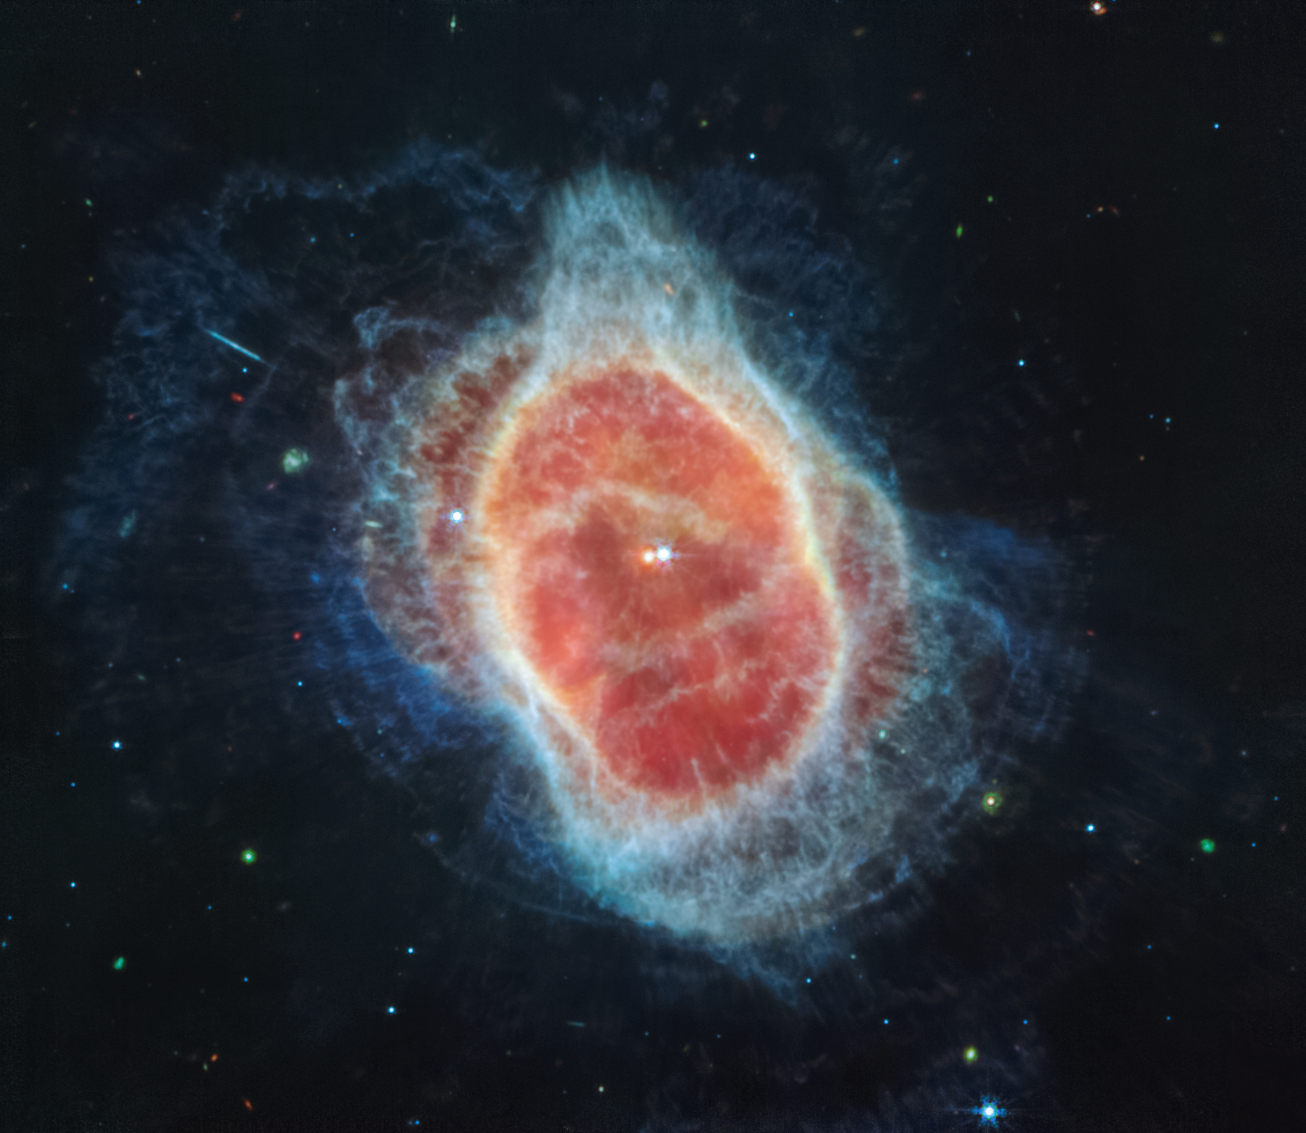

Southern Ring Nebula (MIRI Image)

The NASA/ESA/CSA James Webb Telescope has revealed the cloak of dust around the second star, shown at left in red, at the centre of the Southern Ring Nebula for the first time. It is a hot, dense white dwarf star.

As it transformed into a white dwarf, the star periodically ejected mass — the shells of material you see here. As if on repeat, it contracted, heated up, and then, unable to push out more material, pulsated.

At this stage, it should have shed its last layers. So why is the red star still cloaked in dust? Was material transferred from its companion? Researchers will begin to pursue answers soon.

The bluer star at right in this image has also shaped the scene. It helps stir up the ejected material. The disc around the stars is also wobbling, shooting out spirals of gas and dust over long periods of time. This scene is like witnessing a rotating sprinkler that’s finished shooting out material in all directions over thousands of years.

Webb captured this scene in mid-infrared light — most of which can only be observed from space. Mid-infrared light helps researchers detect objects enshrouded in dust, like the red star.

This Mid-Infrared Instrument (MIRI) image also offers an incredible amount of detail, including a cache of distant galaxies in the background. Most of the multi-coloured points of light are galaxies, not stars. Tiny triangles mark the circular edges of stars, including a blue one within the nebula’s red bottom-most edges, while galaxies look like misshapen circles, straight lines, and spirals.

MIRI was contributed by ESA and NASA, and the instrument was designed and built by a consortium of nationally funded European Institutes (The MIRI European Consortium) in partnership with JPL and the University of Arizona.

For a full array of Webb’s first images and spectra, including downloadable files, please visit: https://esawebb.org/initiatives/webbs-first-images/

Credit: NASA, ESA, CSA, STScI, and the Webb ERO Production Team